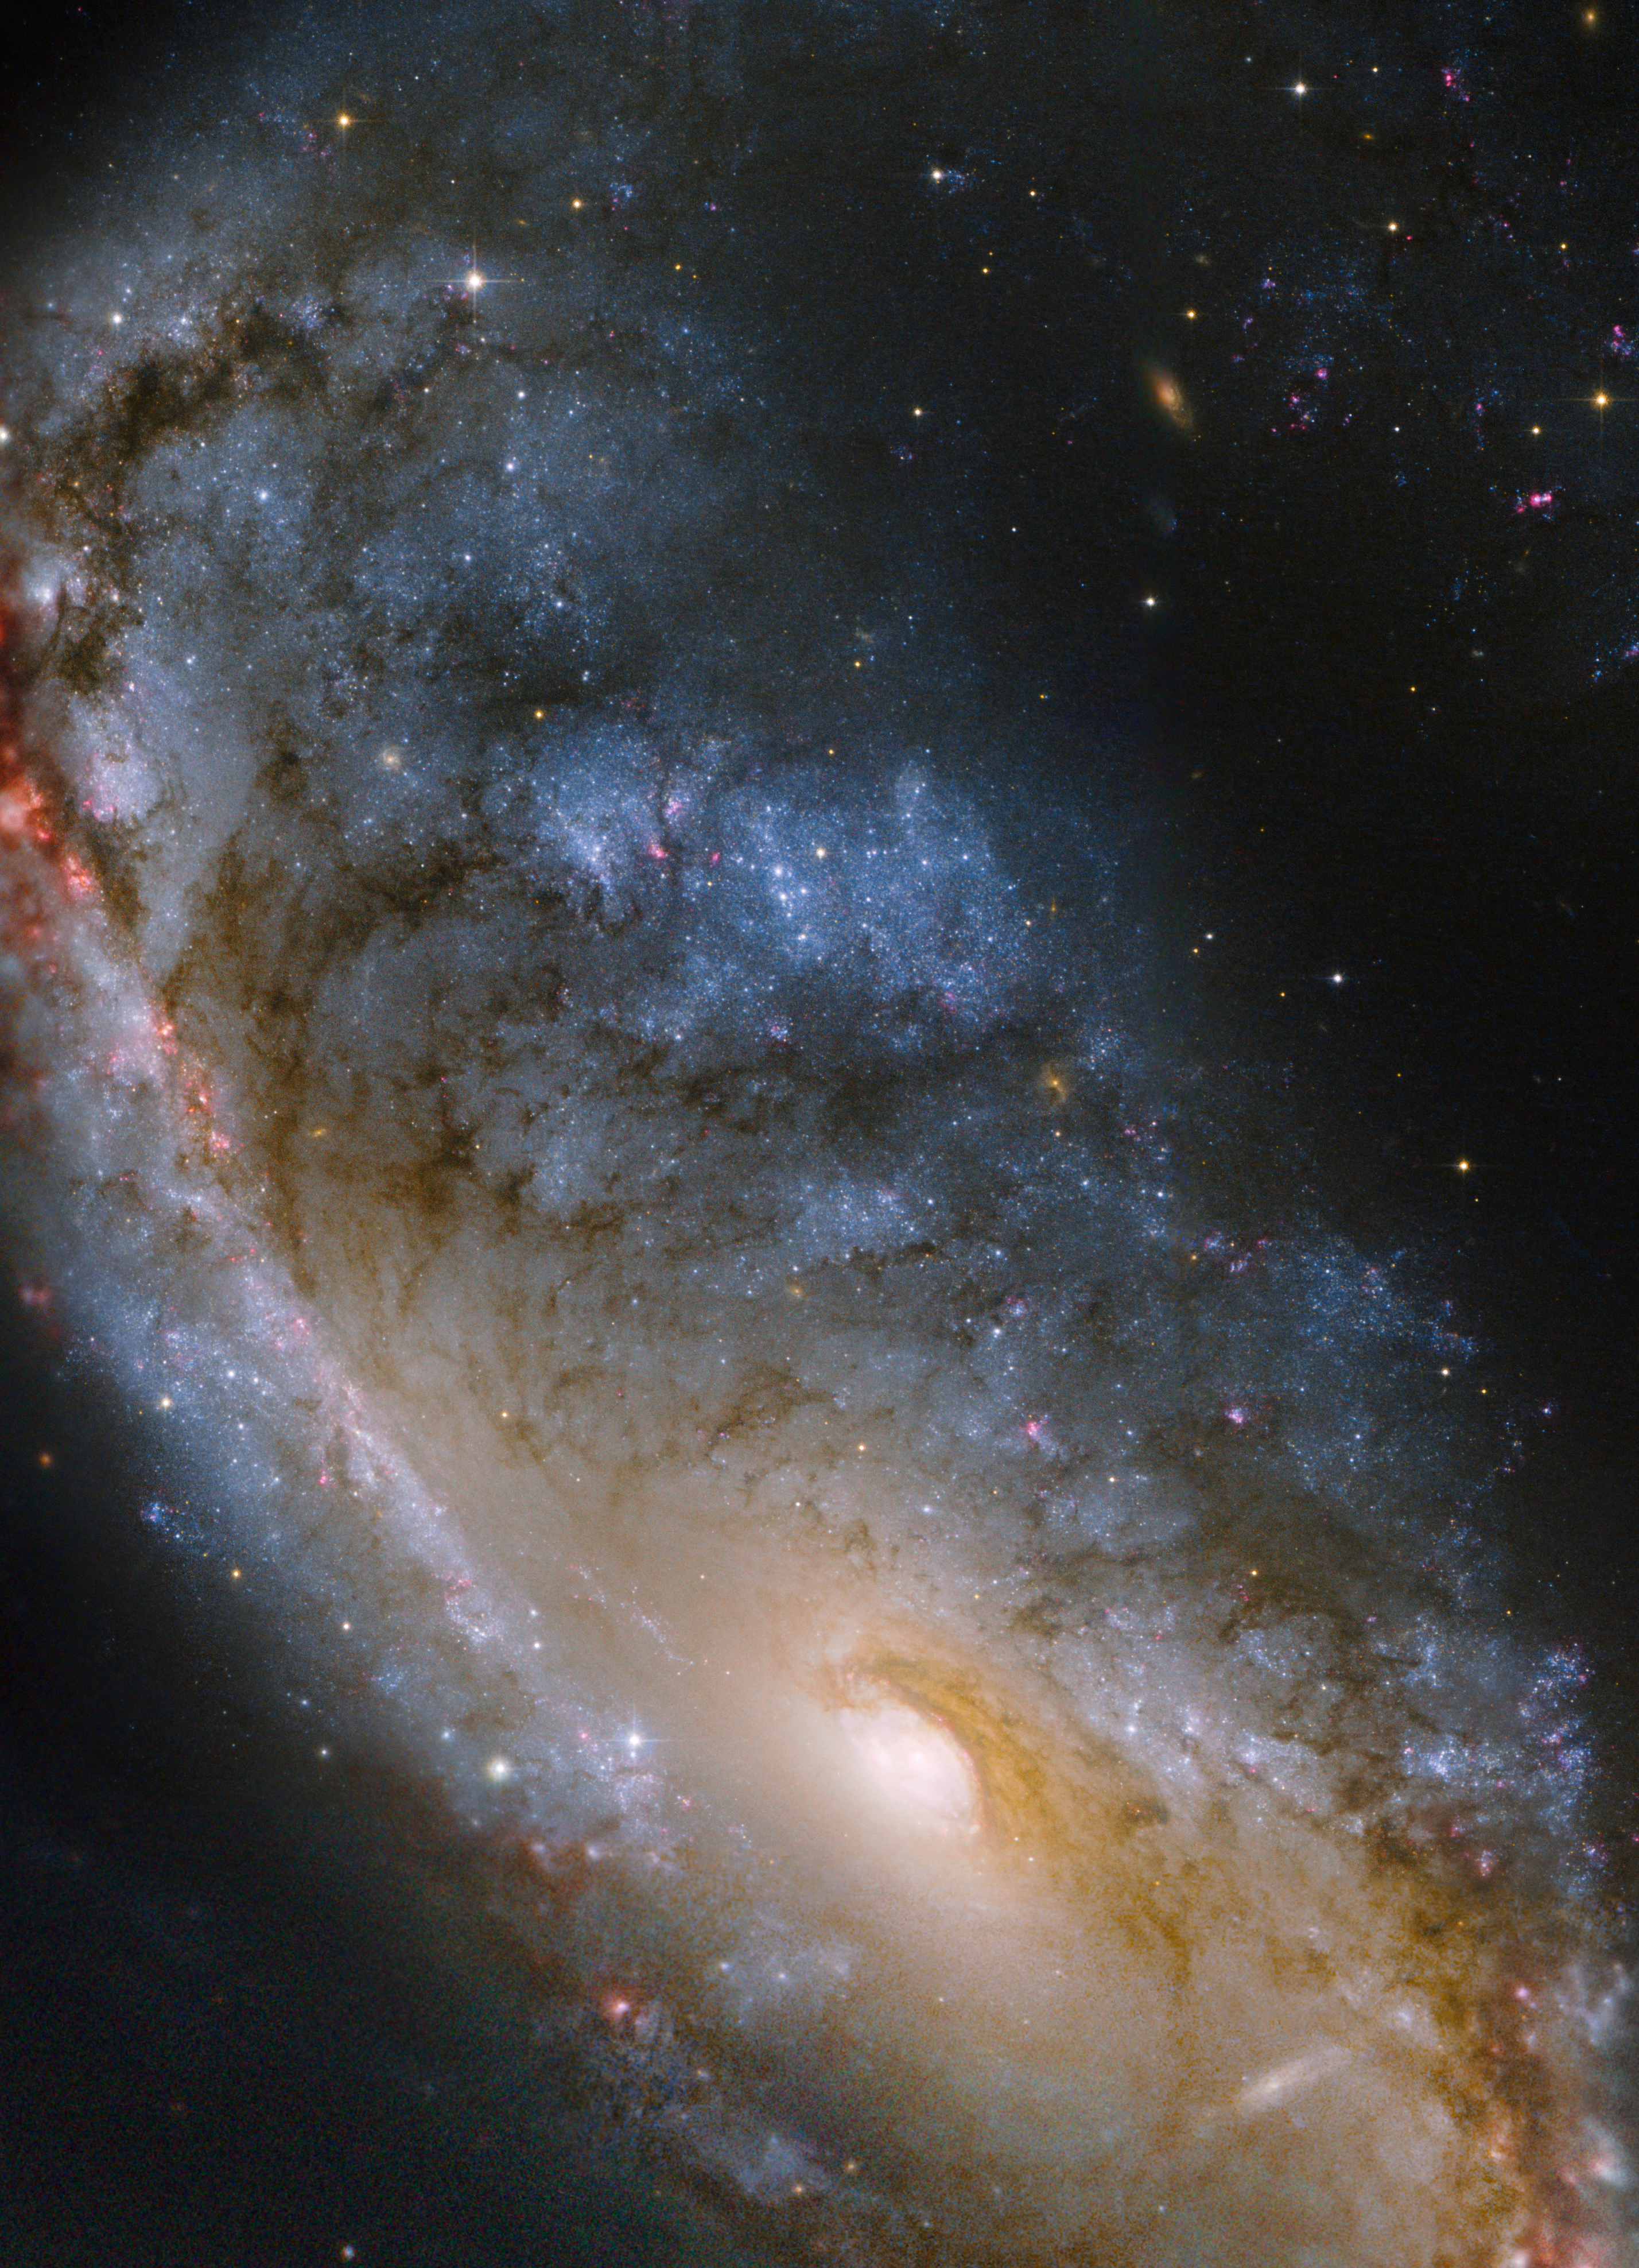

Hubble image of the Meathook Galaxy

This close-up Hubble view of the Meathook Galaxy (NGC 2442) focuses on the more compact of its two asymmetric spiral arms as well as the central regions. The spiral arm was the location of a supernova that exploded in 1999. These Hubble observations were made in 2006 in order to study the aftermath of this supernova. Ground-based data from MPG/ESO 2.2-metre telescope were used to fill out parts of the edges of this image.

Credit: NASA, ESA